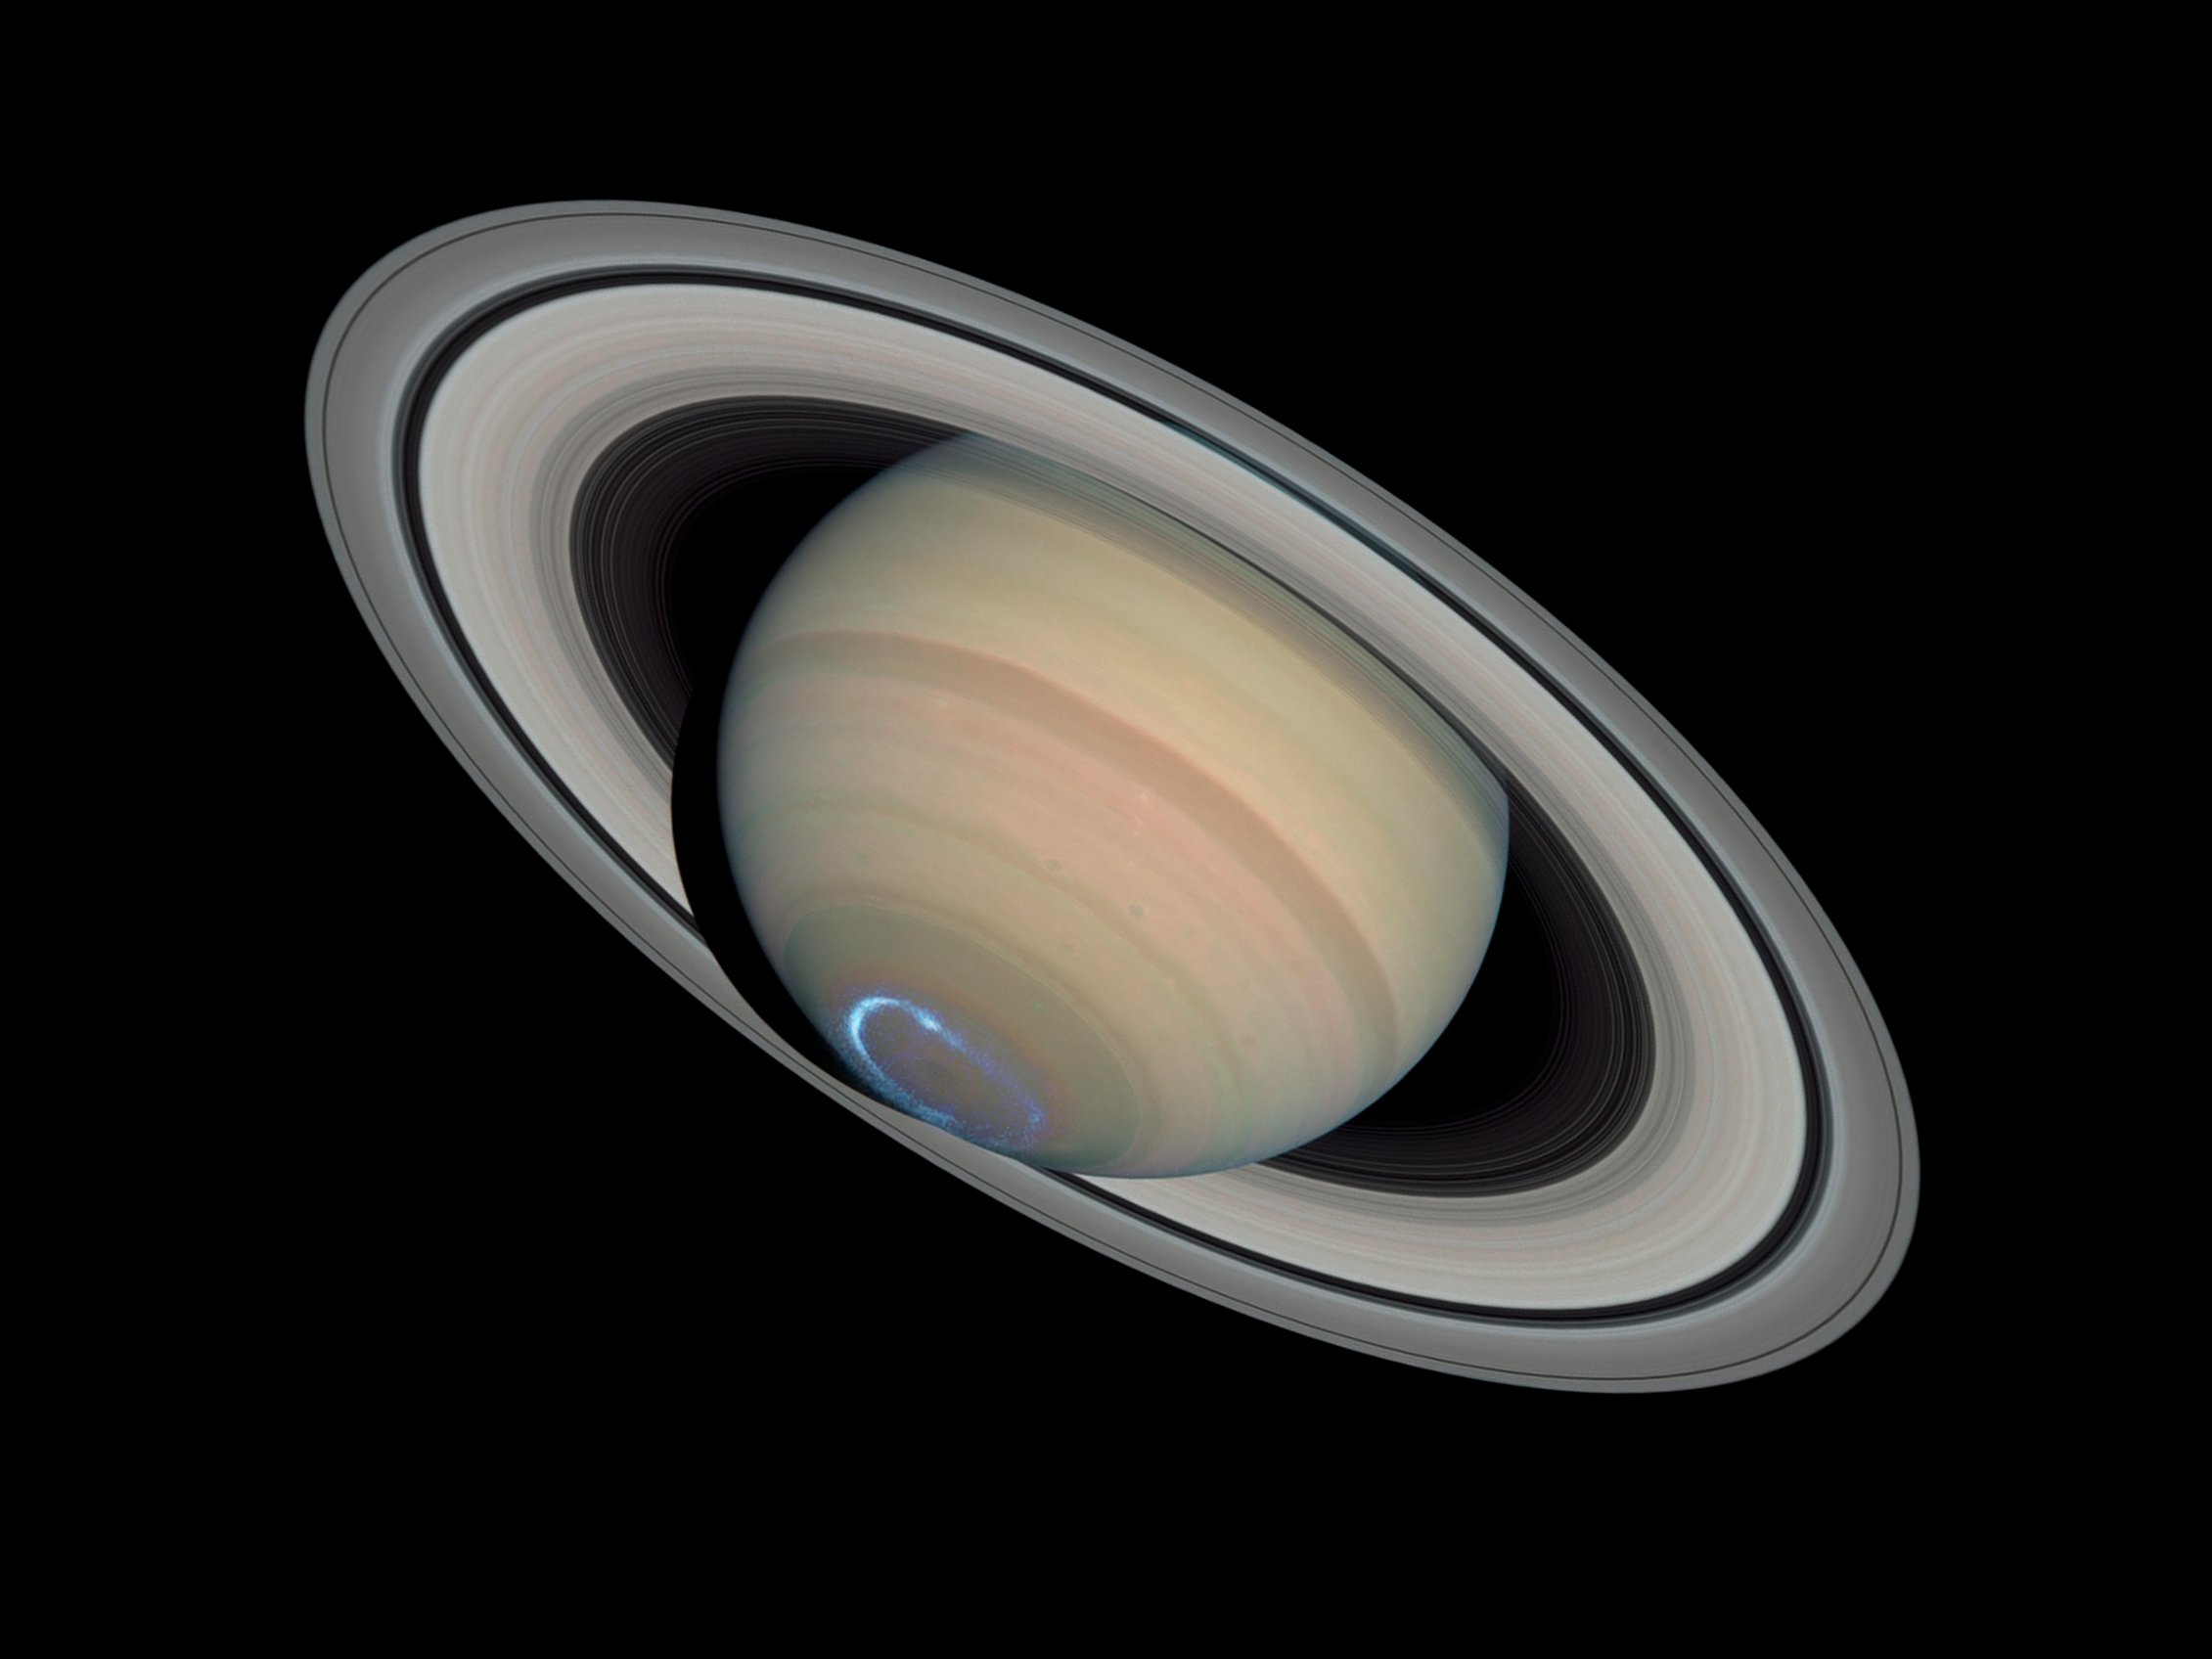

Saturn's dynamic aurorae 1 (Jan 24, 2004)

This is a single image from a sequence of three aurora images.

Astronomers combined ultraviolet images of Saturn's southern polar region with visible-light images of the planet and its rings to make this picture. The auroral display appears blue because of the glow of ultraviolet light. In reality, the aurora would appear red to an observer at Saturn because of the presence of glowing hydrogen in the atmosphere. On Earth, charged particles from the Sun collide with nitrogen and oxygen in the upper atmosphere, creating auroral displays colored mostly green and blue.

The ultraviolet image was taken on Jan. 24, 2004 by Hubble's Space Telescope Imaging Spectrograph. Erich Karkoschka of the University of Arizona, USA used the telescope's Advanced Camera for Surveys on March 22, 2004 to take the visible-light image.

Credit: NASA, ESA, J. Clarke (Boston University, USA), and Z. Levay (STScI)